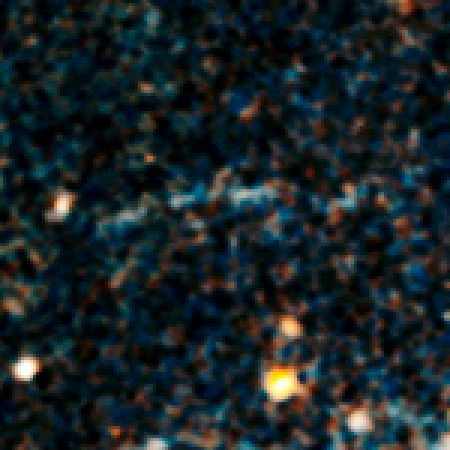

Giant gravitational arc

Seeing is believing, except when you don't believe what you see. Astronomers using NASA's Hubble Space Telescope have found a puzzling arc of light behind an extremely massive cluster of galaxies residing 10 billion light-years away. The galactic grouping, discovered by NASA's Spitzer Space Telescope, was observed when the universe was roughly a quarter of its current age of 13.7 billion years.

The giant arc is the stretched shape of a more distant galaxy whose light is distorted by the monster cluster's powerful gravity, an effect called gravitational lensing. The trouble is, the arc shouldn't exist.

Credit: NASA, ESA/Hubble, and A. Gonzalez (University of Florida, Gainesville, USA), A. Stanford (University of California, Davis and Lawrence Livermore National Laboratory, USA) and M. Brodwin (University of Missouri-Kansas City and Harvard-Smithsonian Center for Astrophysics, USA).